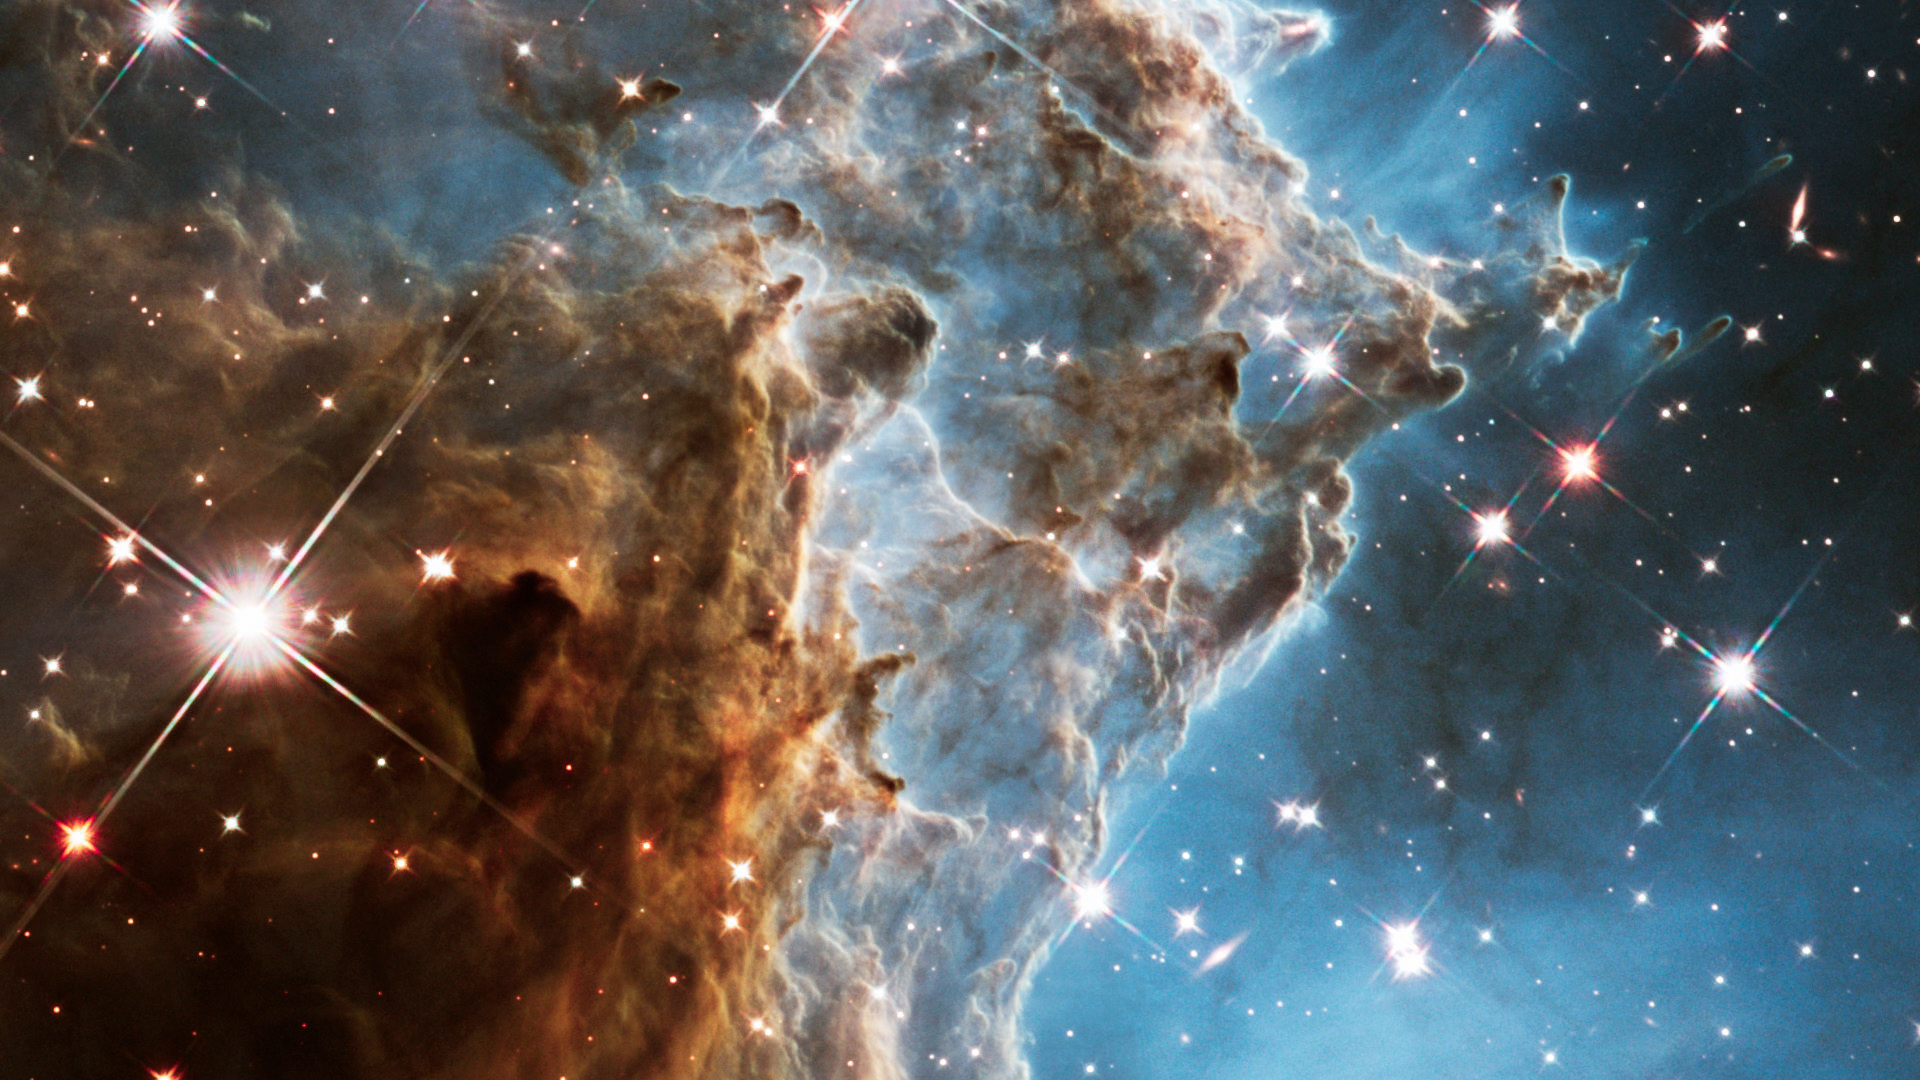

Screenshot of Hubblecast 73

Screenshot of Hubblecast 73: Hubble revisits the Monkey Head Nebula for 24th birthday snap

Credit: NASA & ESA